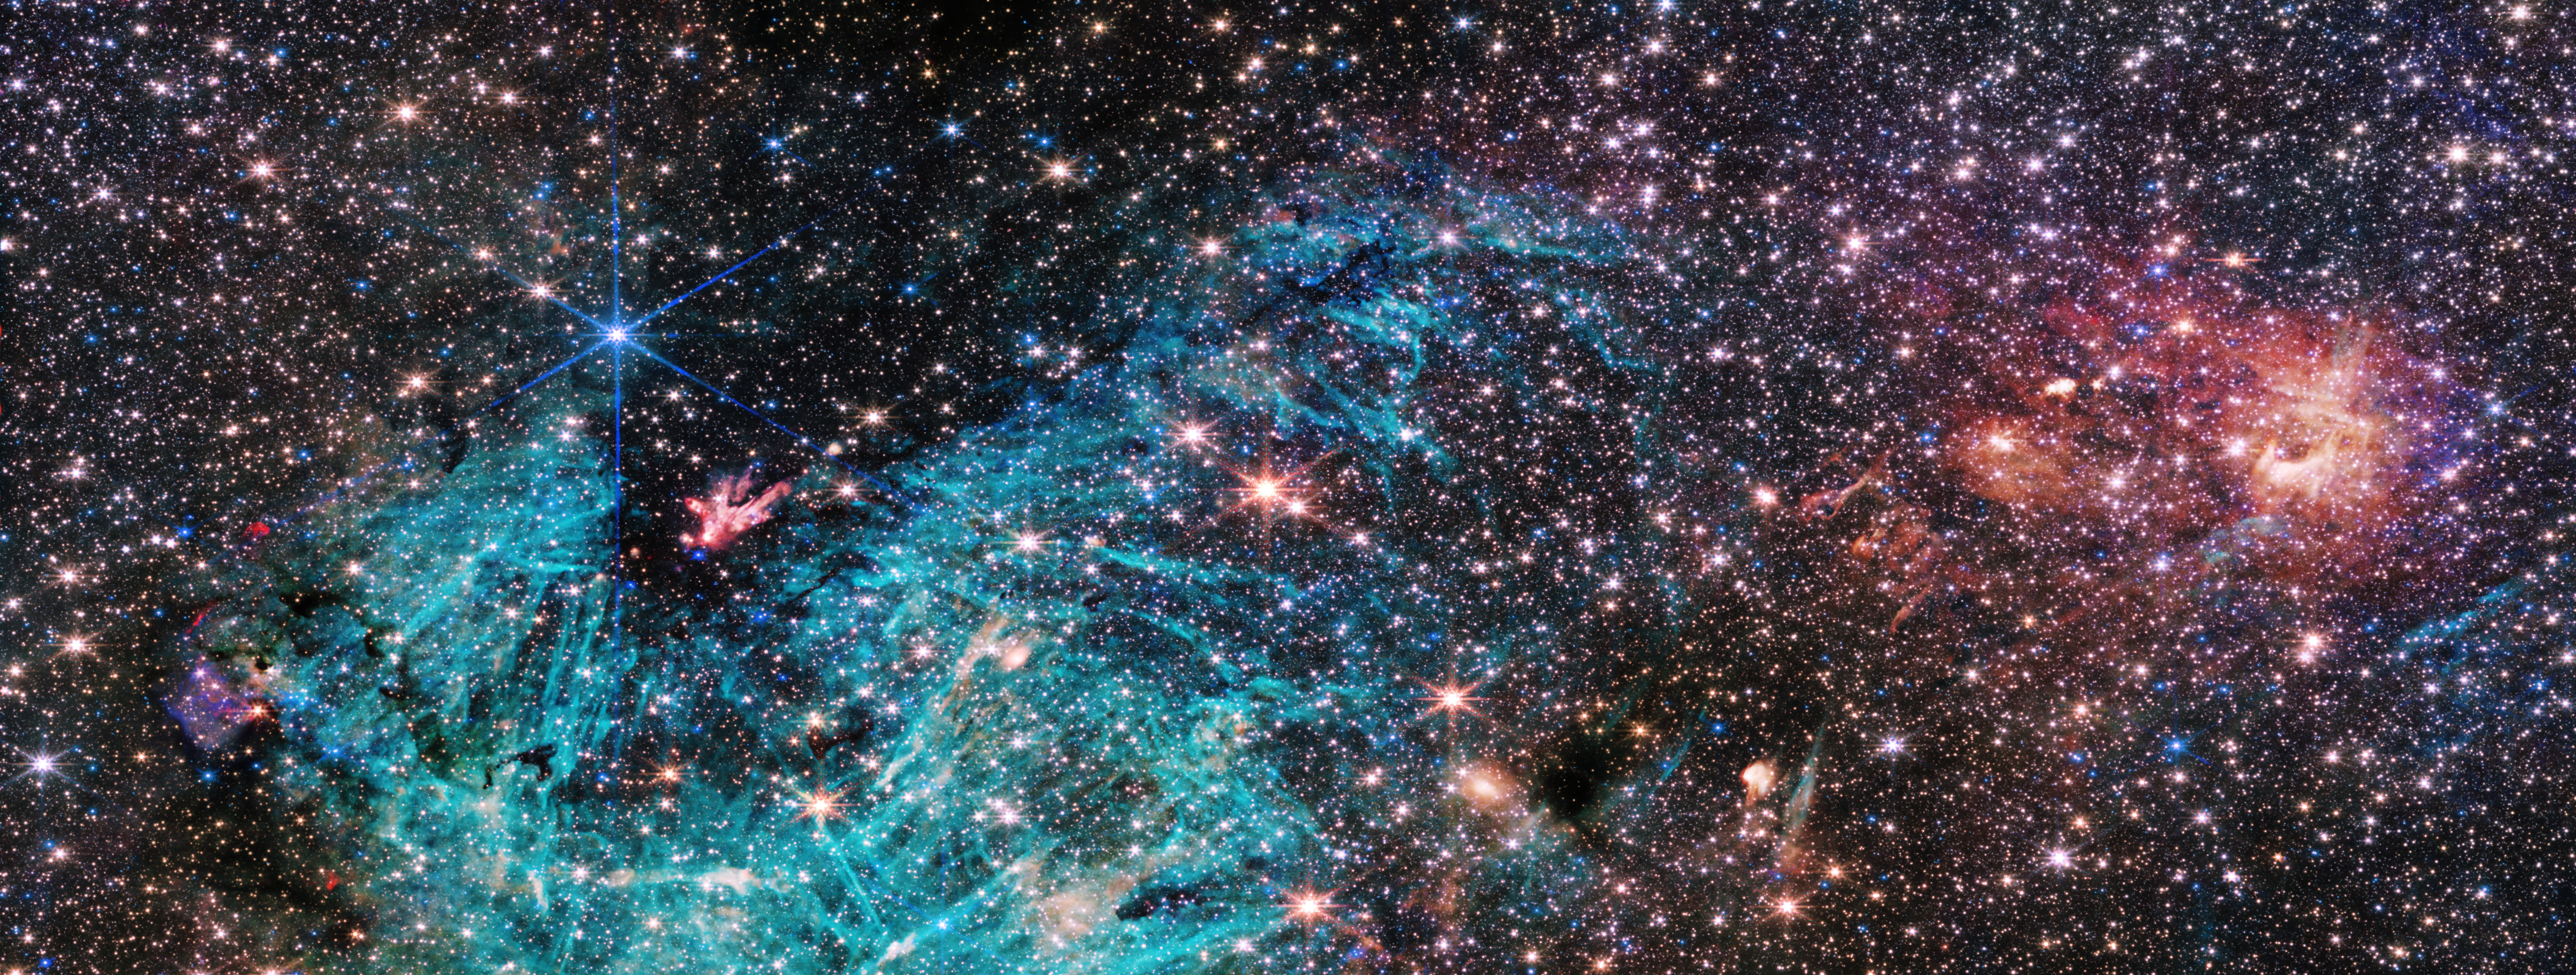

Sagittarius C (NIRCam Image)

The full view of the NASA/ESA/CSA James Webb Space Telescope’s NIRCam (Near-Infrared Camera) instrument reveals a 50 light-years-wide portion of the Milky Way’s dense centre. An estimated 500,000 stars shine in this image of the Sagittarius C (Sgr C) region, along with some as-yet unidentified features.

A vast region of ionised hydrogen, shown in cyan, wraps around an infrared-dark cloud, which is so dense that it blocks the light from distant stars behind it. Intriguing needle-like structures in the ionised hydrogen emission lack any uniform orientation. Researchers note the surprising extent of the ionised region, covering about 25 light-years.

A cluster of protostars – stars that are still forming and gaining mass – are producing outflows that glow like a bonfire at the base of the large infrared-dark cloud, indicating that they are emerging from the cloud’s protective cocoon and will soon join the ranks of the more mature stars around them. Smaller infrared-dark clouds dot the scene, appearing like holes in the starfield.

Researchers say they have only begun to dig into the wealth of unprecedented high-resolution data that Webb has provided on this region, and many features bear detailed study. This includes the rose-coloured clouds on the right side of the image, which have never been seen in such detail.

Credit: NASA, ESA, CSA, STScI, S. Crowe (UVA)